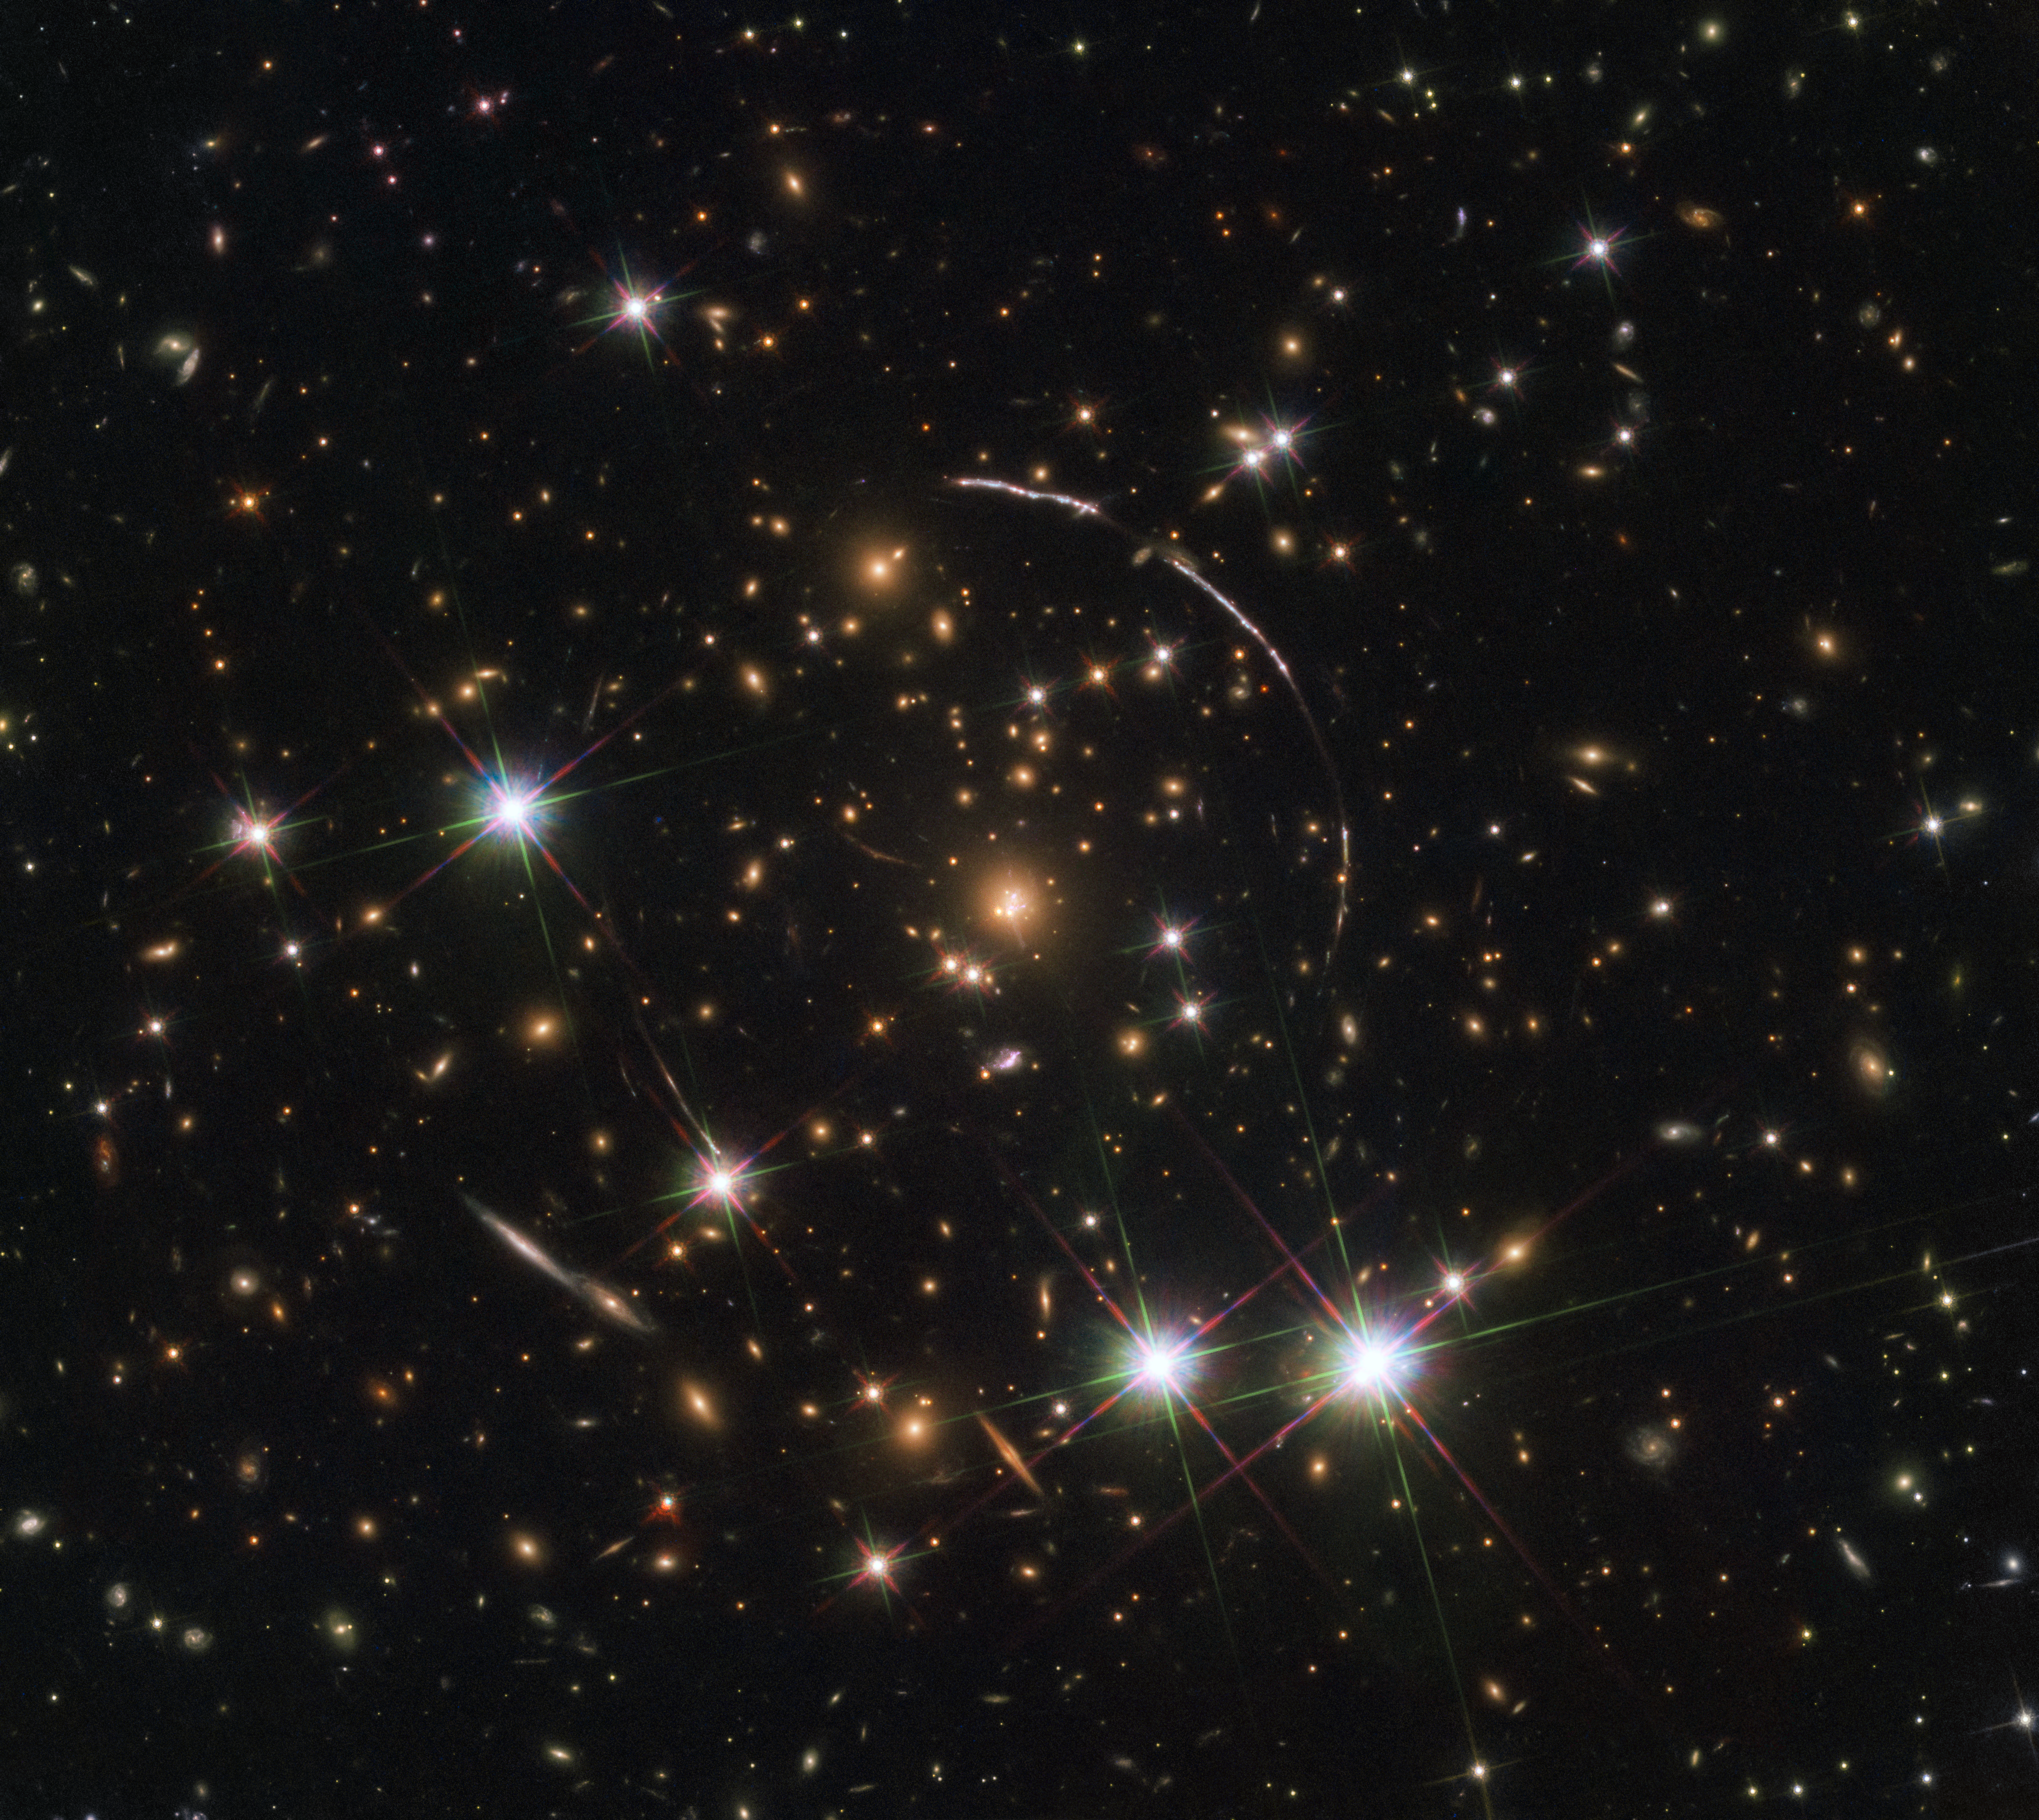

The Sunburst Arc

This image, taken with the NASA/ESA Hubble Space Telescope, shows a massive galaxy cluster, about 4.6 billion light years away. Along its borders four bright arcs are visible; these are copies of the same distant galaxy, nicknamed the Sunburst Arc.

The Sunburst Arc galaxy is almost 11 billion light-years away and the light from it is being lensed into multiple images by gravitational lensing. The Sunburst Arc is among the brightest lensed galaxies known and its image is visible at least 12 times within the four arcs.

Three arcs are visible in the top right of the image, the fourth arc in the lower left. The last one is partially obscured by a bright foreground star, which is located in the Milky Way.

Credit: ESA/Hubble, NASA, Rivera-Thorsen et al.